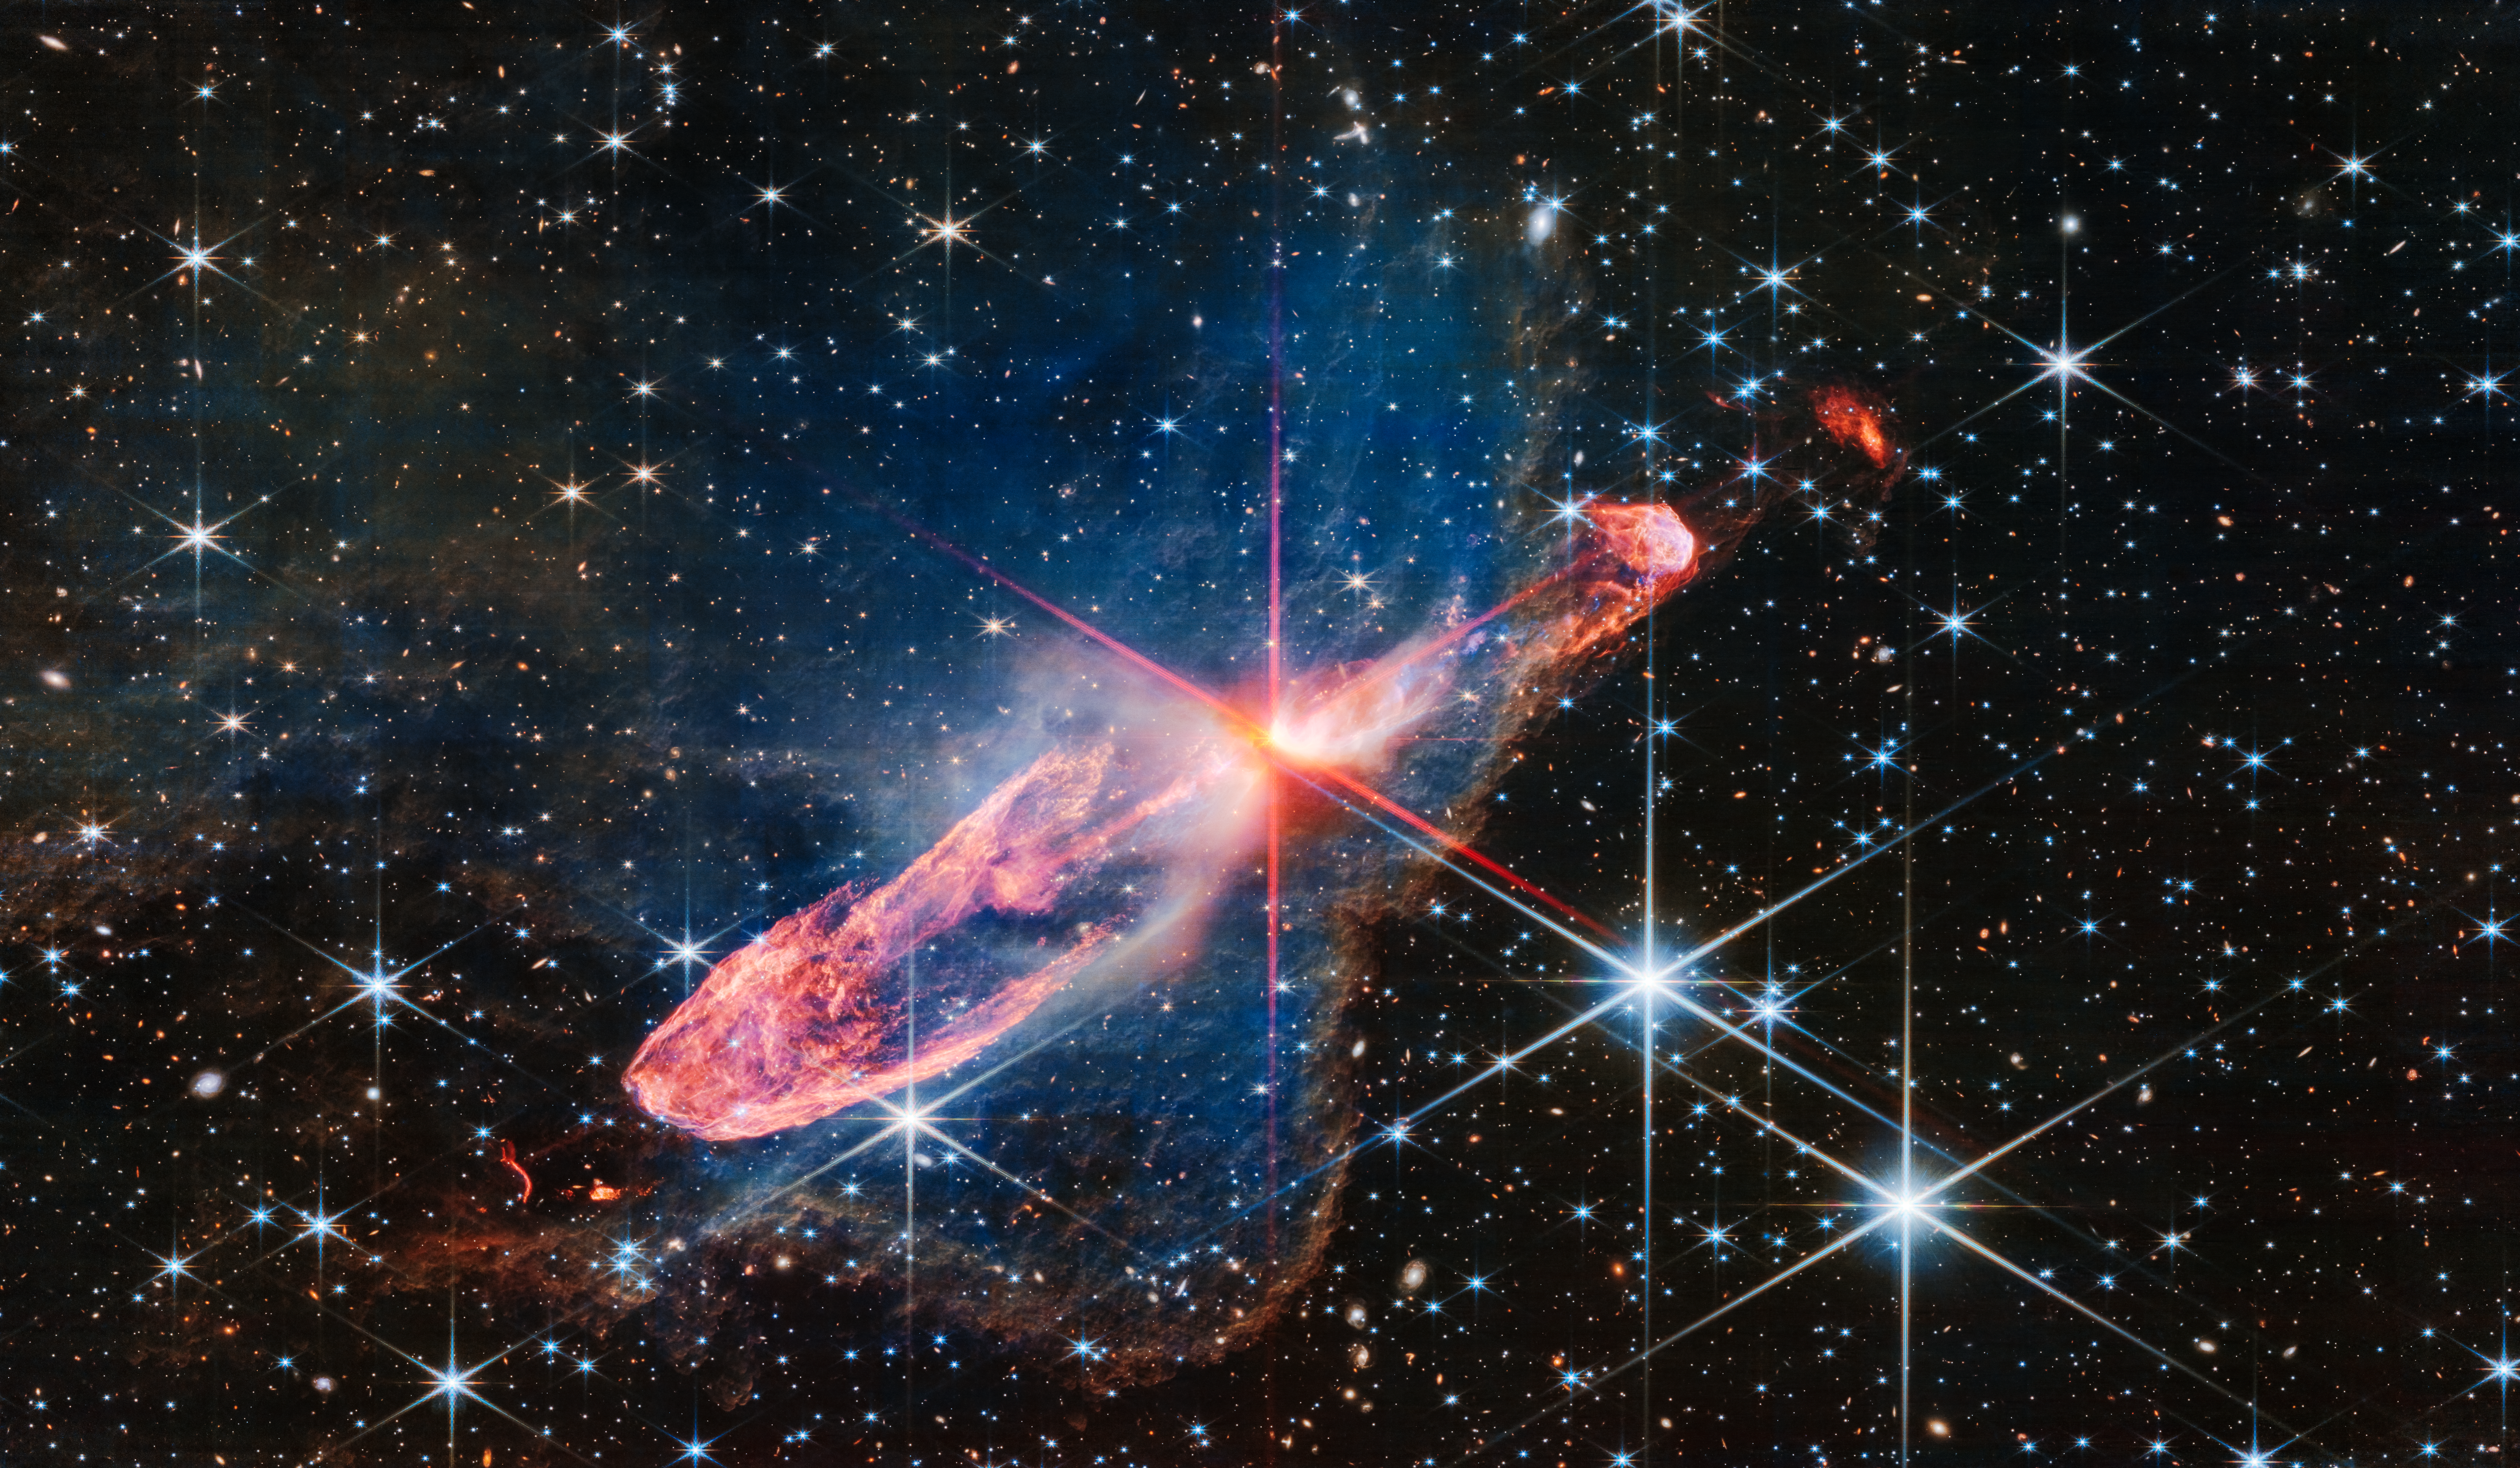

Herbig-Haro 46/47 (NIRCam image)

The NASA/ESA/CSA James Webb Space Telescope has captured a high-resolution image of a tightly bound pair of actively forming stars, known as Herbig-Haro 46/47, in near-infrared light. Look for them at the centre of the red diffraction spikes. The stars are buried deeply, appearing as an orange-white splotch. They are surrounded by a disc of gas and dust that continues to add to their mass.

Herbig-Haro 46/47 is an important object to study because it is relatively young — only a few thousand years old. Stars take millions of years to form. Targets like this also give researchers insight into how stars gather mass over time, potentially allowing them to model how our own Sun, a low-mass star, formed.

The two-sided orange lobes were created by earlier ejections from these stars. The stars’ more recent ejections appear as blue, thread-like features, running along the angled diffraction spike that covers the orange lobes.

Actively forming stars ingest the gas and dust that immediately surrounds them in a disc (imagine an edge-on circle encasing them). When the stars ‘eat’ too much material in too short a time, they respond by sending out two-sided jets along the opposite axis, settling down the star’s spin, and removing mass from the area. Over millennia, these ejections regulate how much mass the stars retain.

Don’t miss the delicate, semi-transparent blue cloud. This is a region of dense dust and gas, known as a nebula. Webb’s crisp near-infrared image lets us see through its gauzy layers, showing off a lot more of Herbig-Haro 46/47, while also revealing a wide range of stars and galaxies that lie far beyond it. The nebula’s edges transform into a soft orange outline, like a backward L along the right and bottom of the image.

The blue nebula influences the shapes of the orange jets shot out by the central stars. As ejected material rams into the nebula on the lower left, it takes on wider shapes, because there is more opportunity for the jets to interact with molecules within the nebula. Its material also causes the stars’ ejections to light up.

Over millions of years the stars in Herbig-Haro 46/47 will form fully — clearing the scene.

Take a moment to linger on the background. A profusion of extremely distant galaxies dot Webb’s view. Its composite NIRCam (Near-Infrared Camera) image is made up of several exposures, highlighting distant galaxies and stars. Blue objects with diffraction spikes are stars, and the closer they are, the larger they appear. White-and-pink spiral galaxies sometimes appear larger than these stars, but are significantly farther away. The tiniest red dots, Webb’s infrared specialty, are often the oldest, most distant galaxies.

Credit: NASA, ESA, CSA, J. DePasquale (STScI)